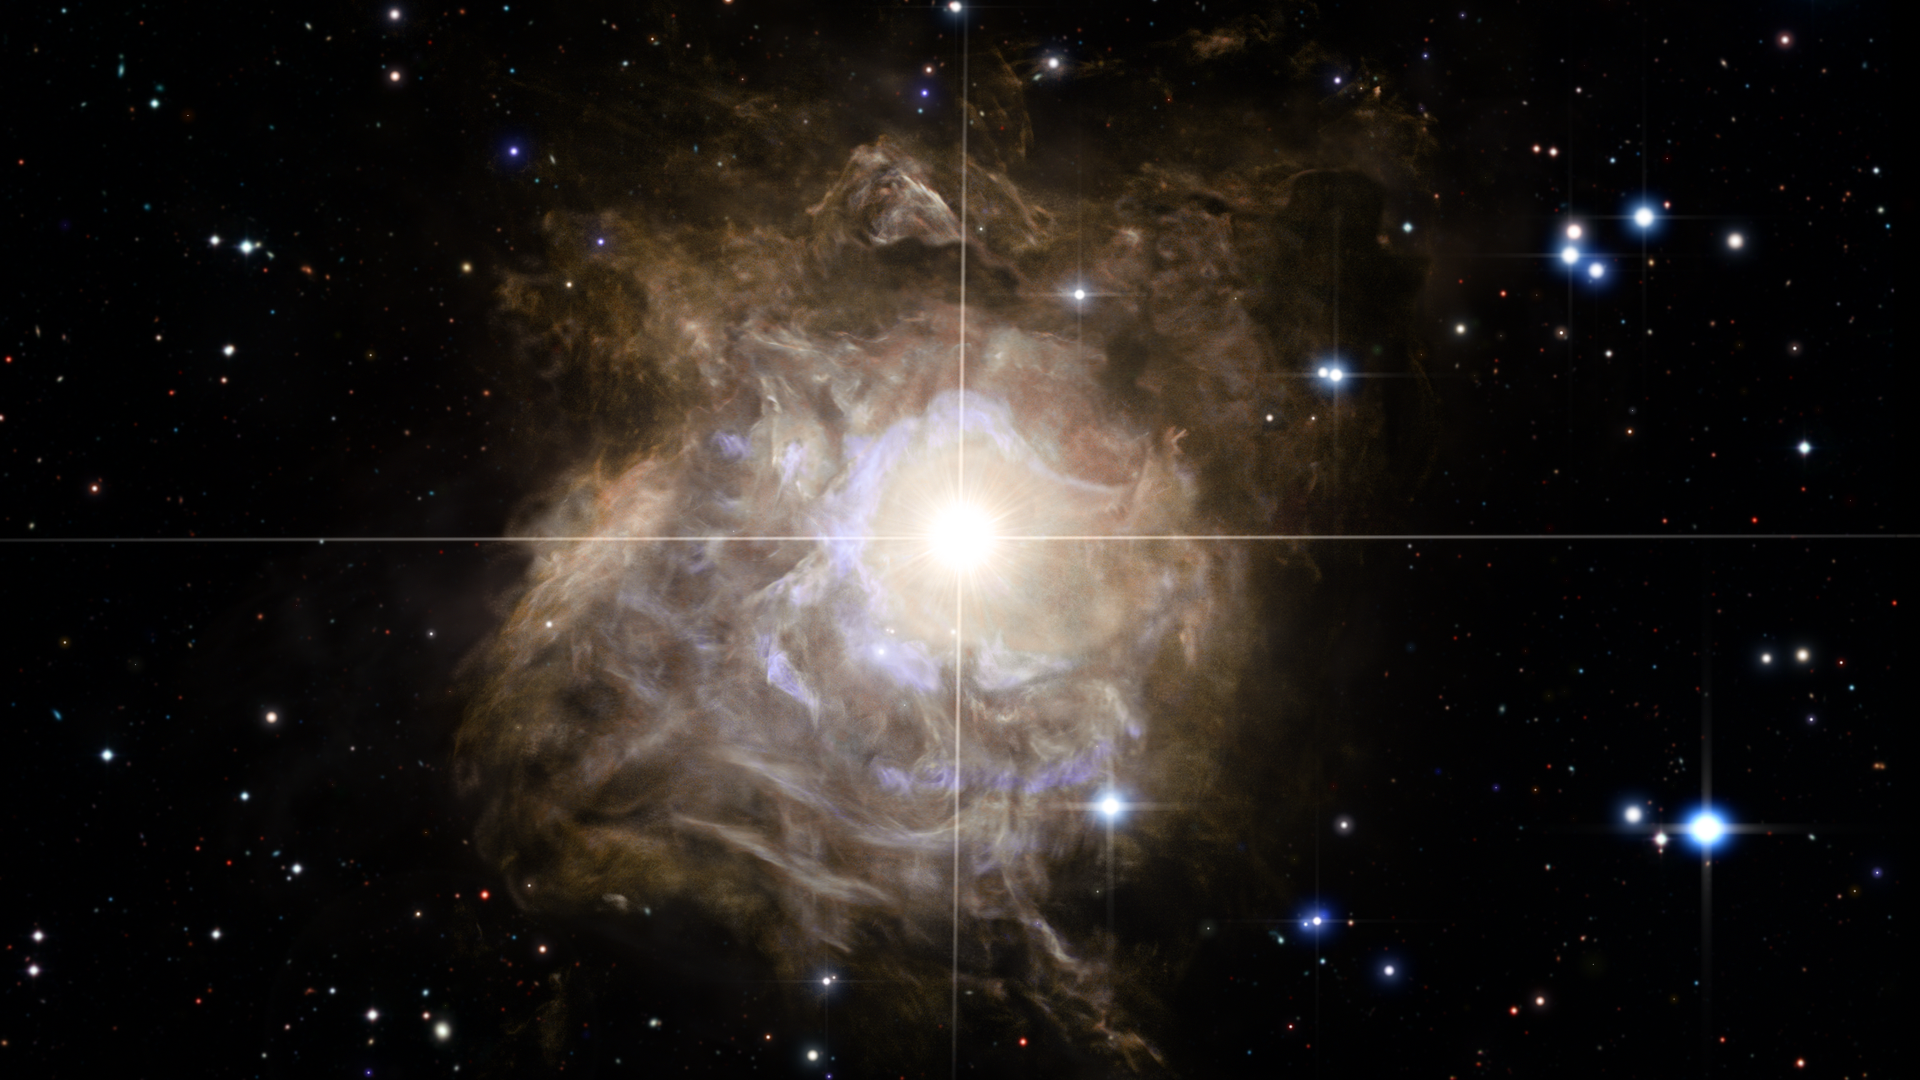

Screenshot of Hubblecast 71

Screenshot of Hubblecast 71: Visible echoes around RS Puppis.

Credit: NASA & ESA